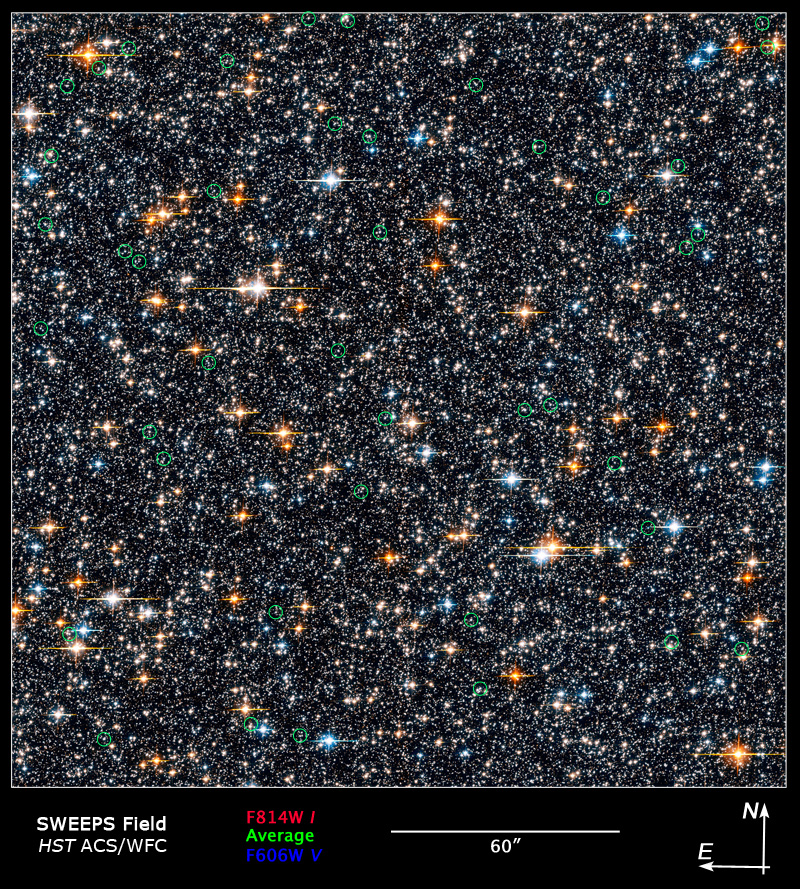

Compass and scale omage of Hubble SWEEPS field

Compass and scale omage of Hubble SWEEPS field.

Credit: NASA, ESA and Z. Levay (STScI). Science Credit: NASA, ESA, W. Clarkson (Indiana University and UCLA) and K. Sahu (STScI)